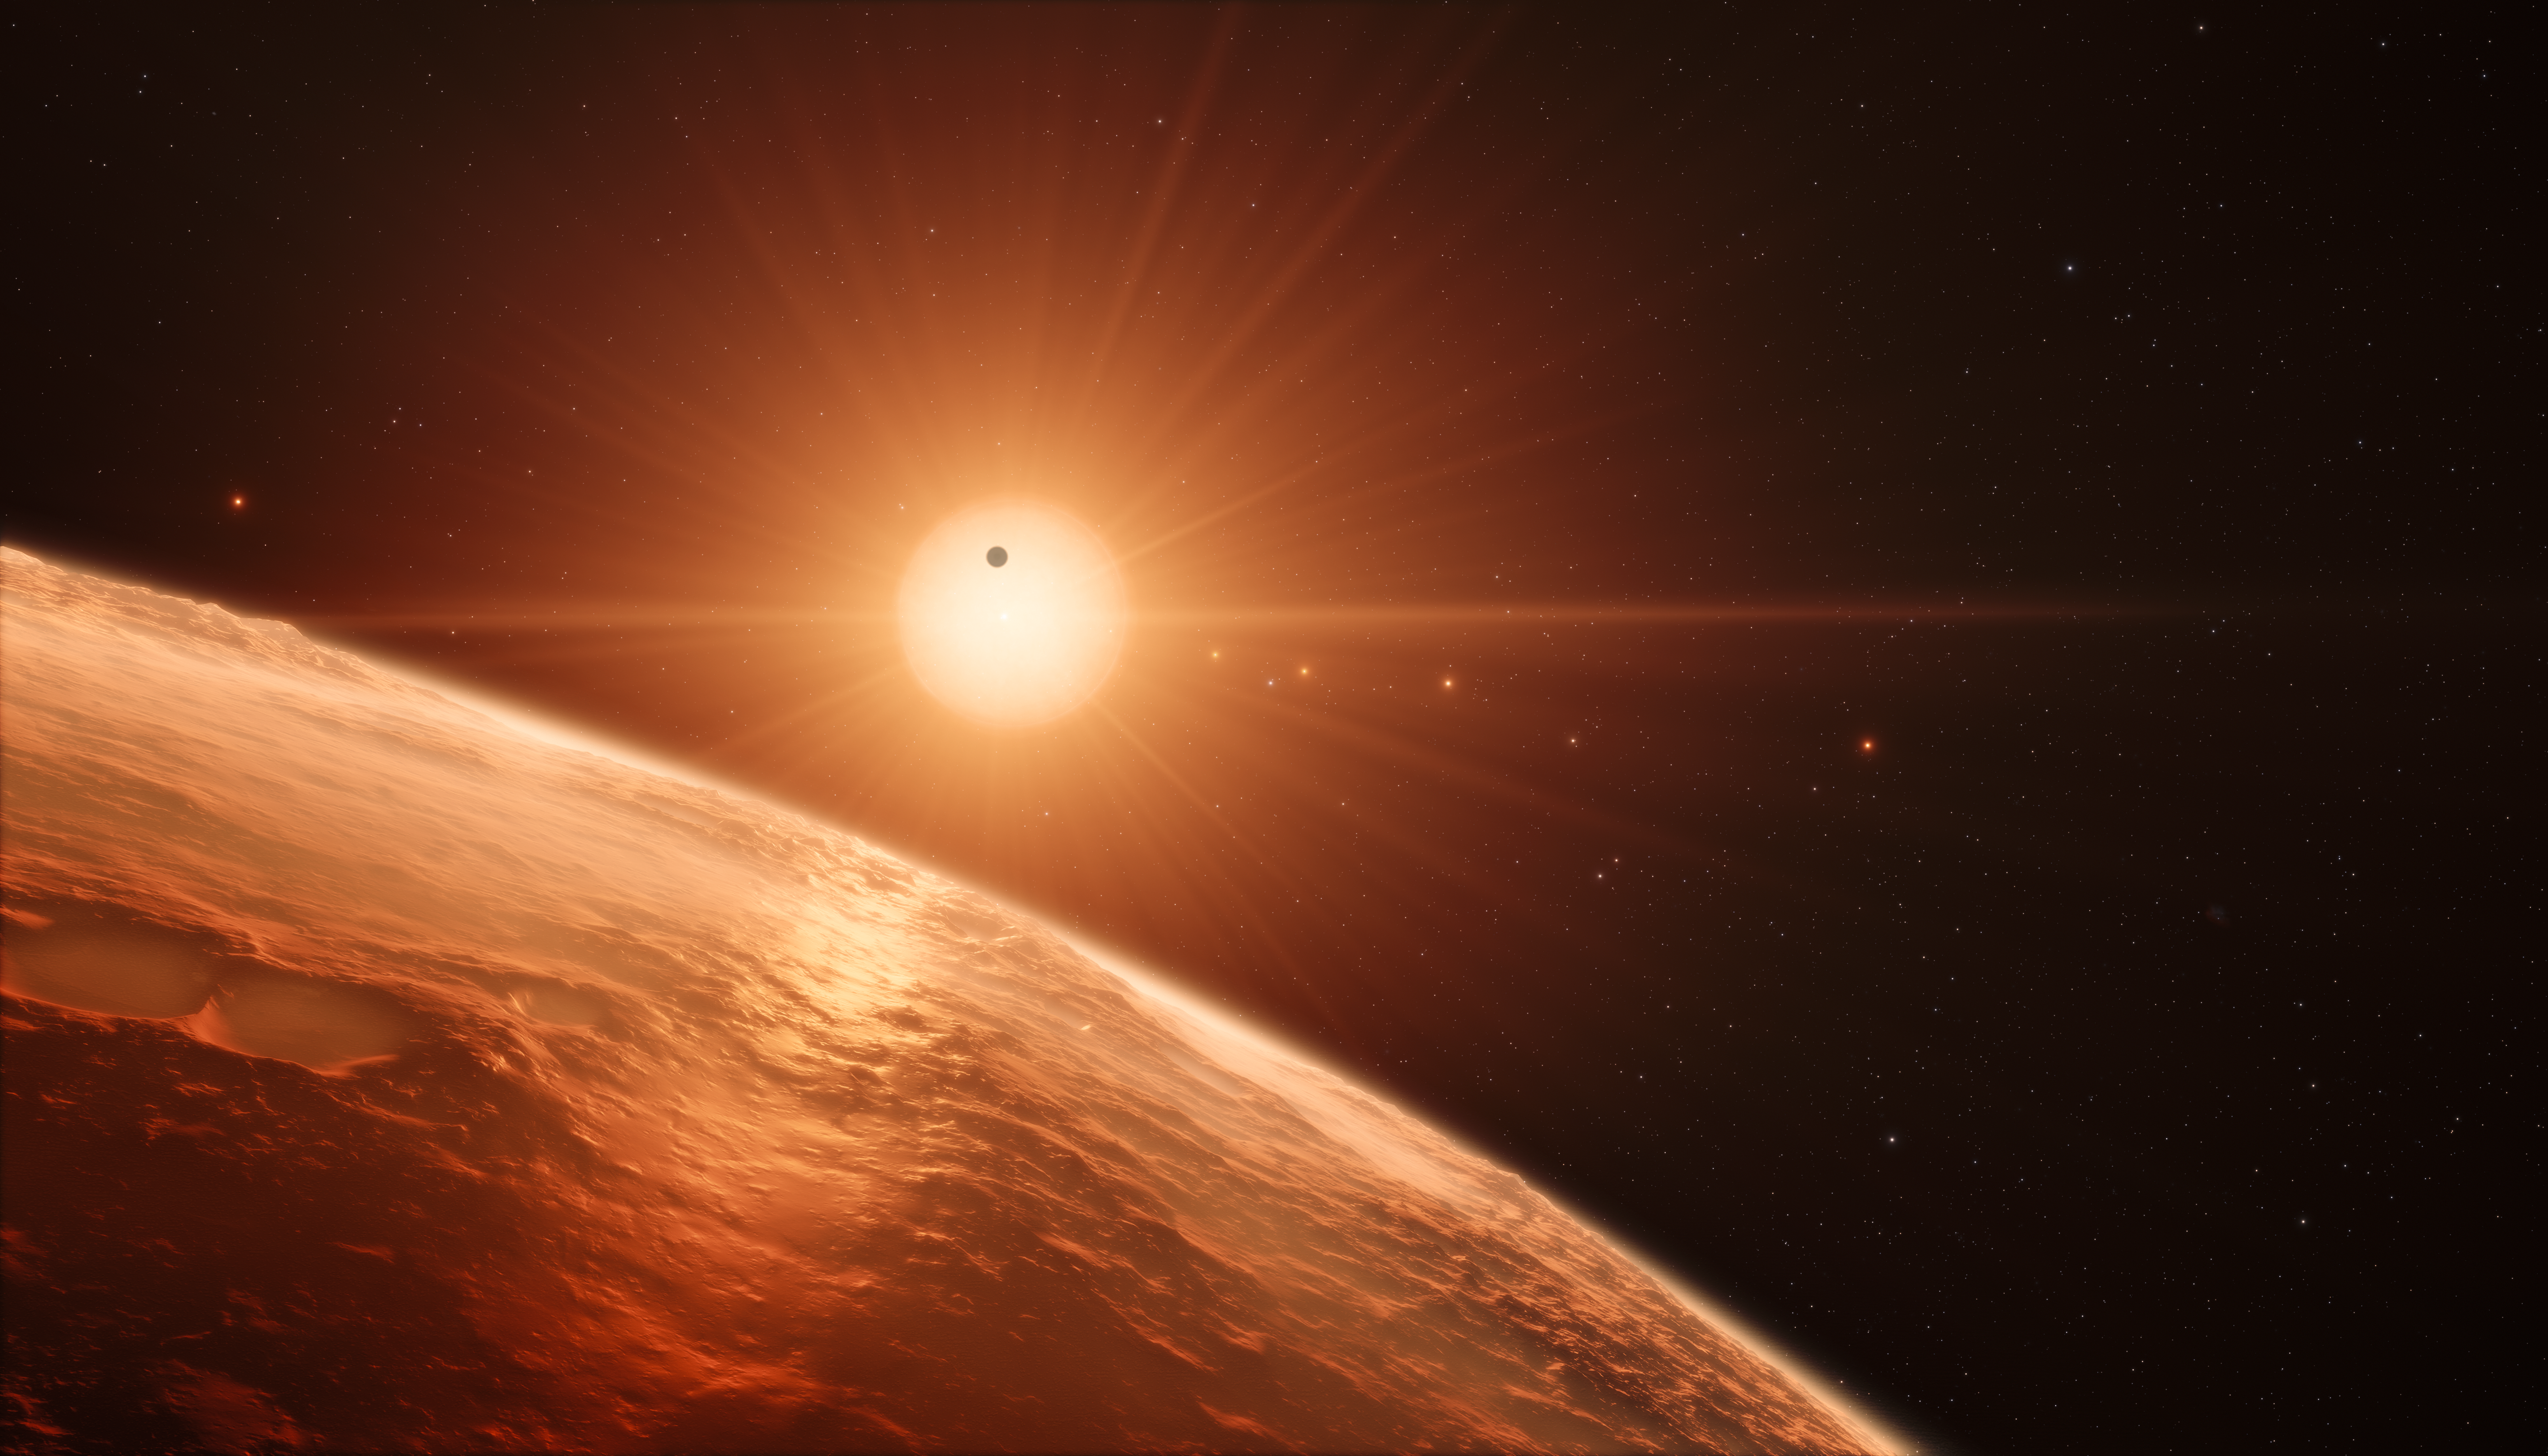

Artist’s impression of the TRAPPIST-1 planetary system

This artist’s impression shows the view from the surface of one of the planets in the TRAPPIST-1 system. At least seven planets orbit this ultra cool dwarf star 40 light-years from Earth and they are all roughly the same size as the Earth. They are at the right distances from their star for liquid water to exist on the surfaces of several of them.

Credit: ESO/M. Kornmesser